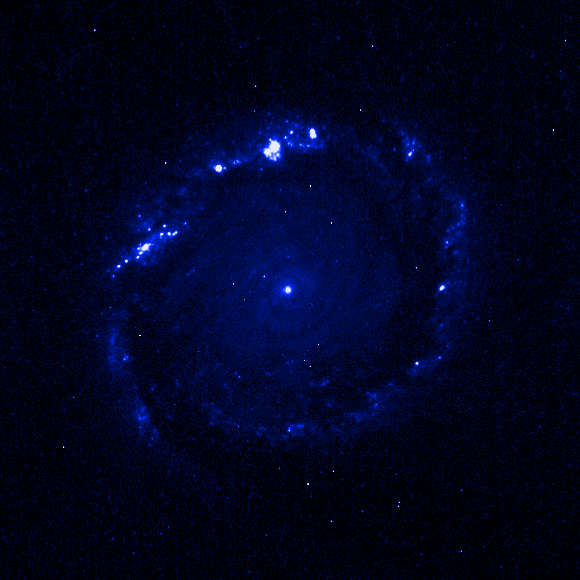

Individual colour images - 2 (WFPC2, 338 nm)

This is the second in a sequence of seven images which demonstrate the Hubble telescope's wavelength range, starting in the far ultraviolet and stretching all the way to the infrared.

This image was taken by the Wide Field and Planetary Camera 2(WFPC2). The blue colour (338 nm) denotes the ultraviolet region of the spectrum. The image was taken on 5 March, 1999, and has an exposure time of 2500 s.

This image is issued jointly by NASA and ESA.

Credit: NASA, ESA, Dan Maoz (Tel-Aviv University, Israel, and Columbia University, USA)